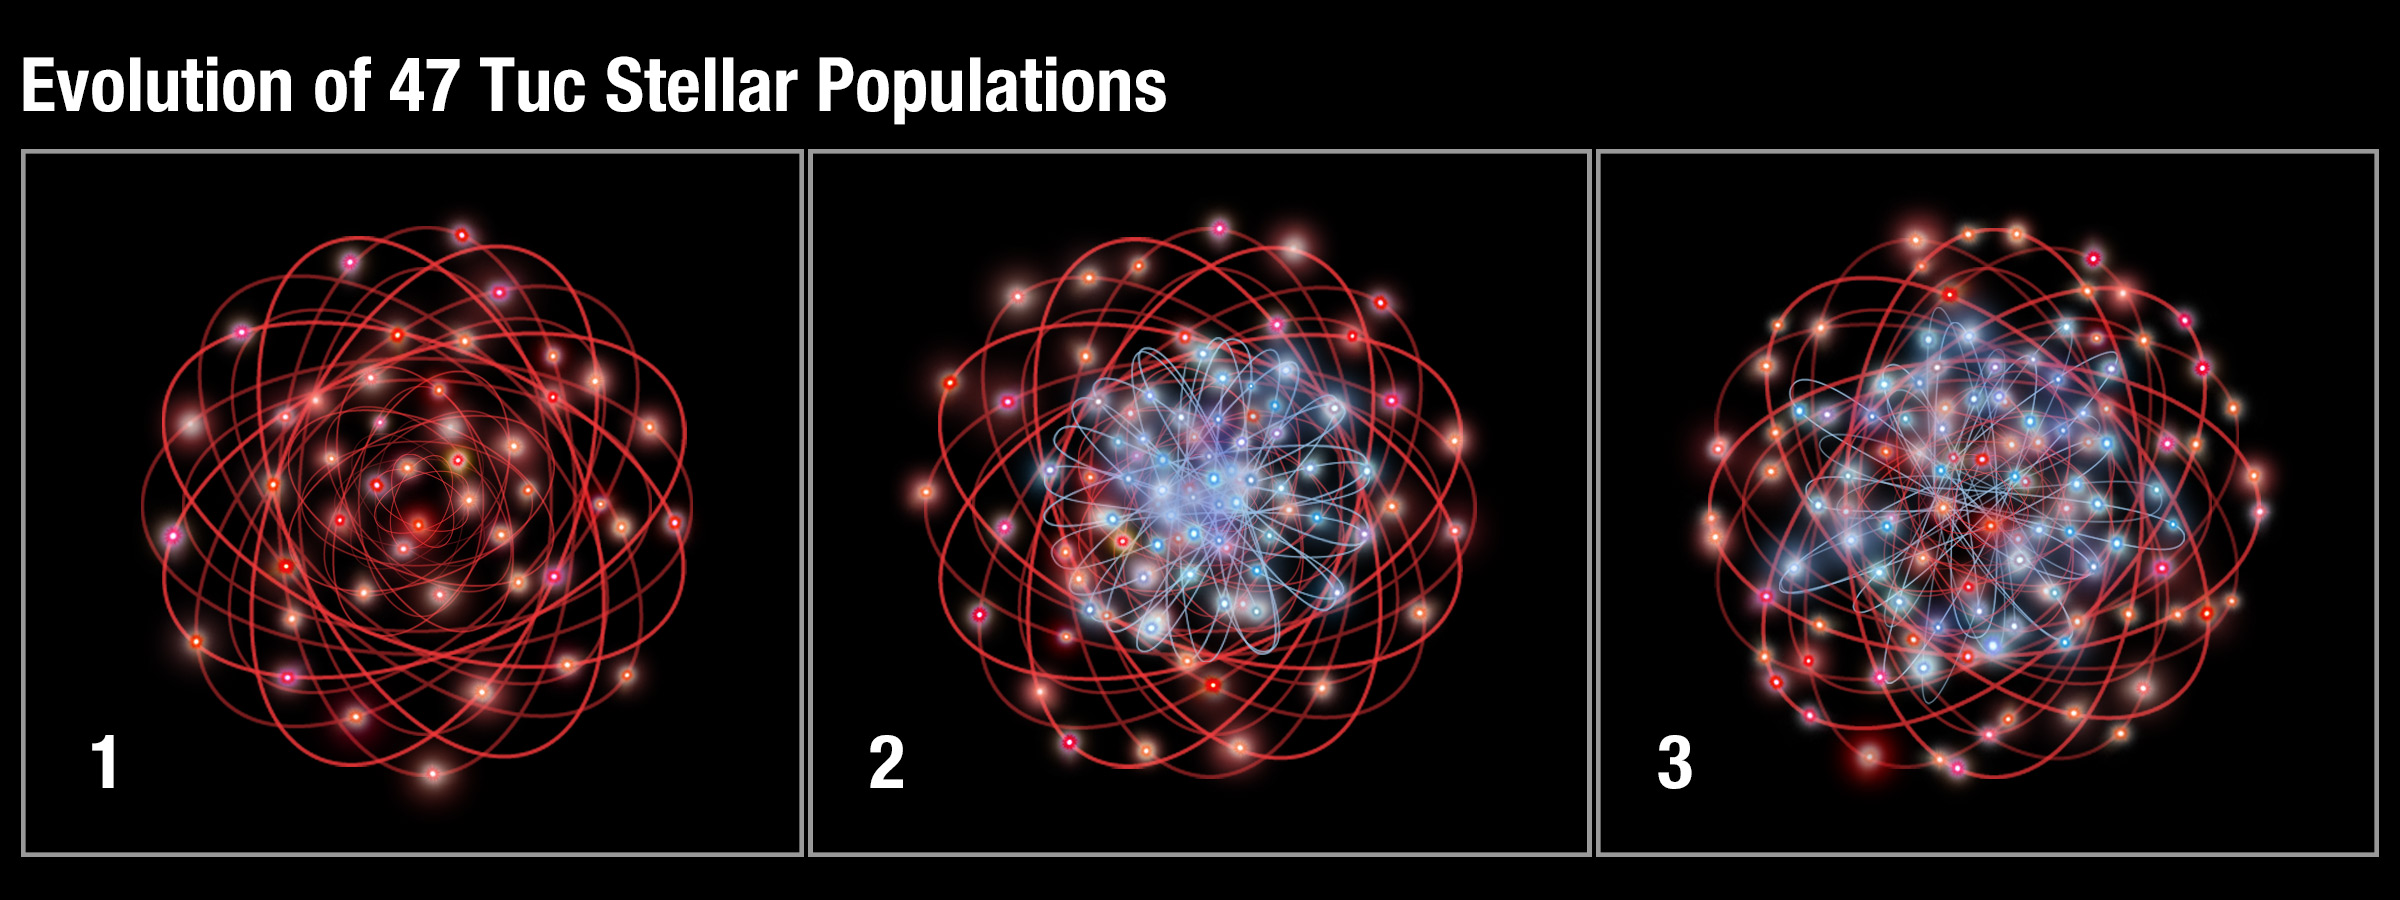

Evolution of 47 Tuc stellar populations

This illustration shows the evolution of two populations of stars in the ancient globular cluster 47 Tucanae.

The first panel shows a grouping of red stars, an older population containing fewer chemical elements heavier than helium and hydrogen. These stars move in random, circular orbits. As the most massive of these stars die, they return chemically enhanced material back into the cluster. This material helps to form another generation of stars, shown as the blue stars in the second panel. The blue stars are more chemically enriched and are concentrated towards the cluster's centre, traveling in elliptical orbits. Slowly, over time, the blue stars have been moving outward, putting them on more radial orbits, as seen in the third panel.

Credit: NASA, ESA, and A. Feild (STScI)